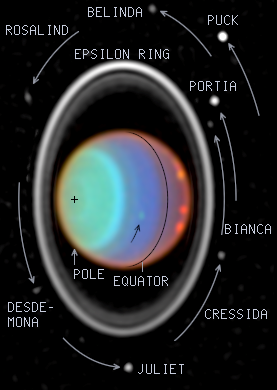

Hubble Tracks Clouds on Uranus

At visible and near-infrared light, sunlight is reflected from hazes and clouds in the atmosphere of Uranus. However, at near-infrared light, absorption by gases in the Uranian atmosphere limits the view to different altitudes, causing intense contrasts and colors.

Credit: Erich Karkoschka (University of Arizona), and NASA/ESA